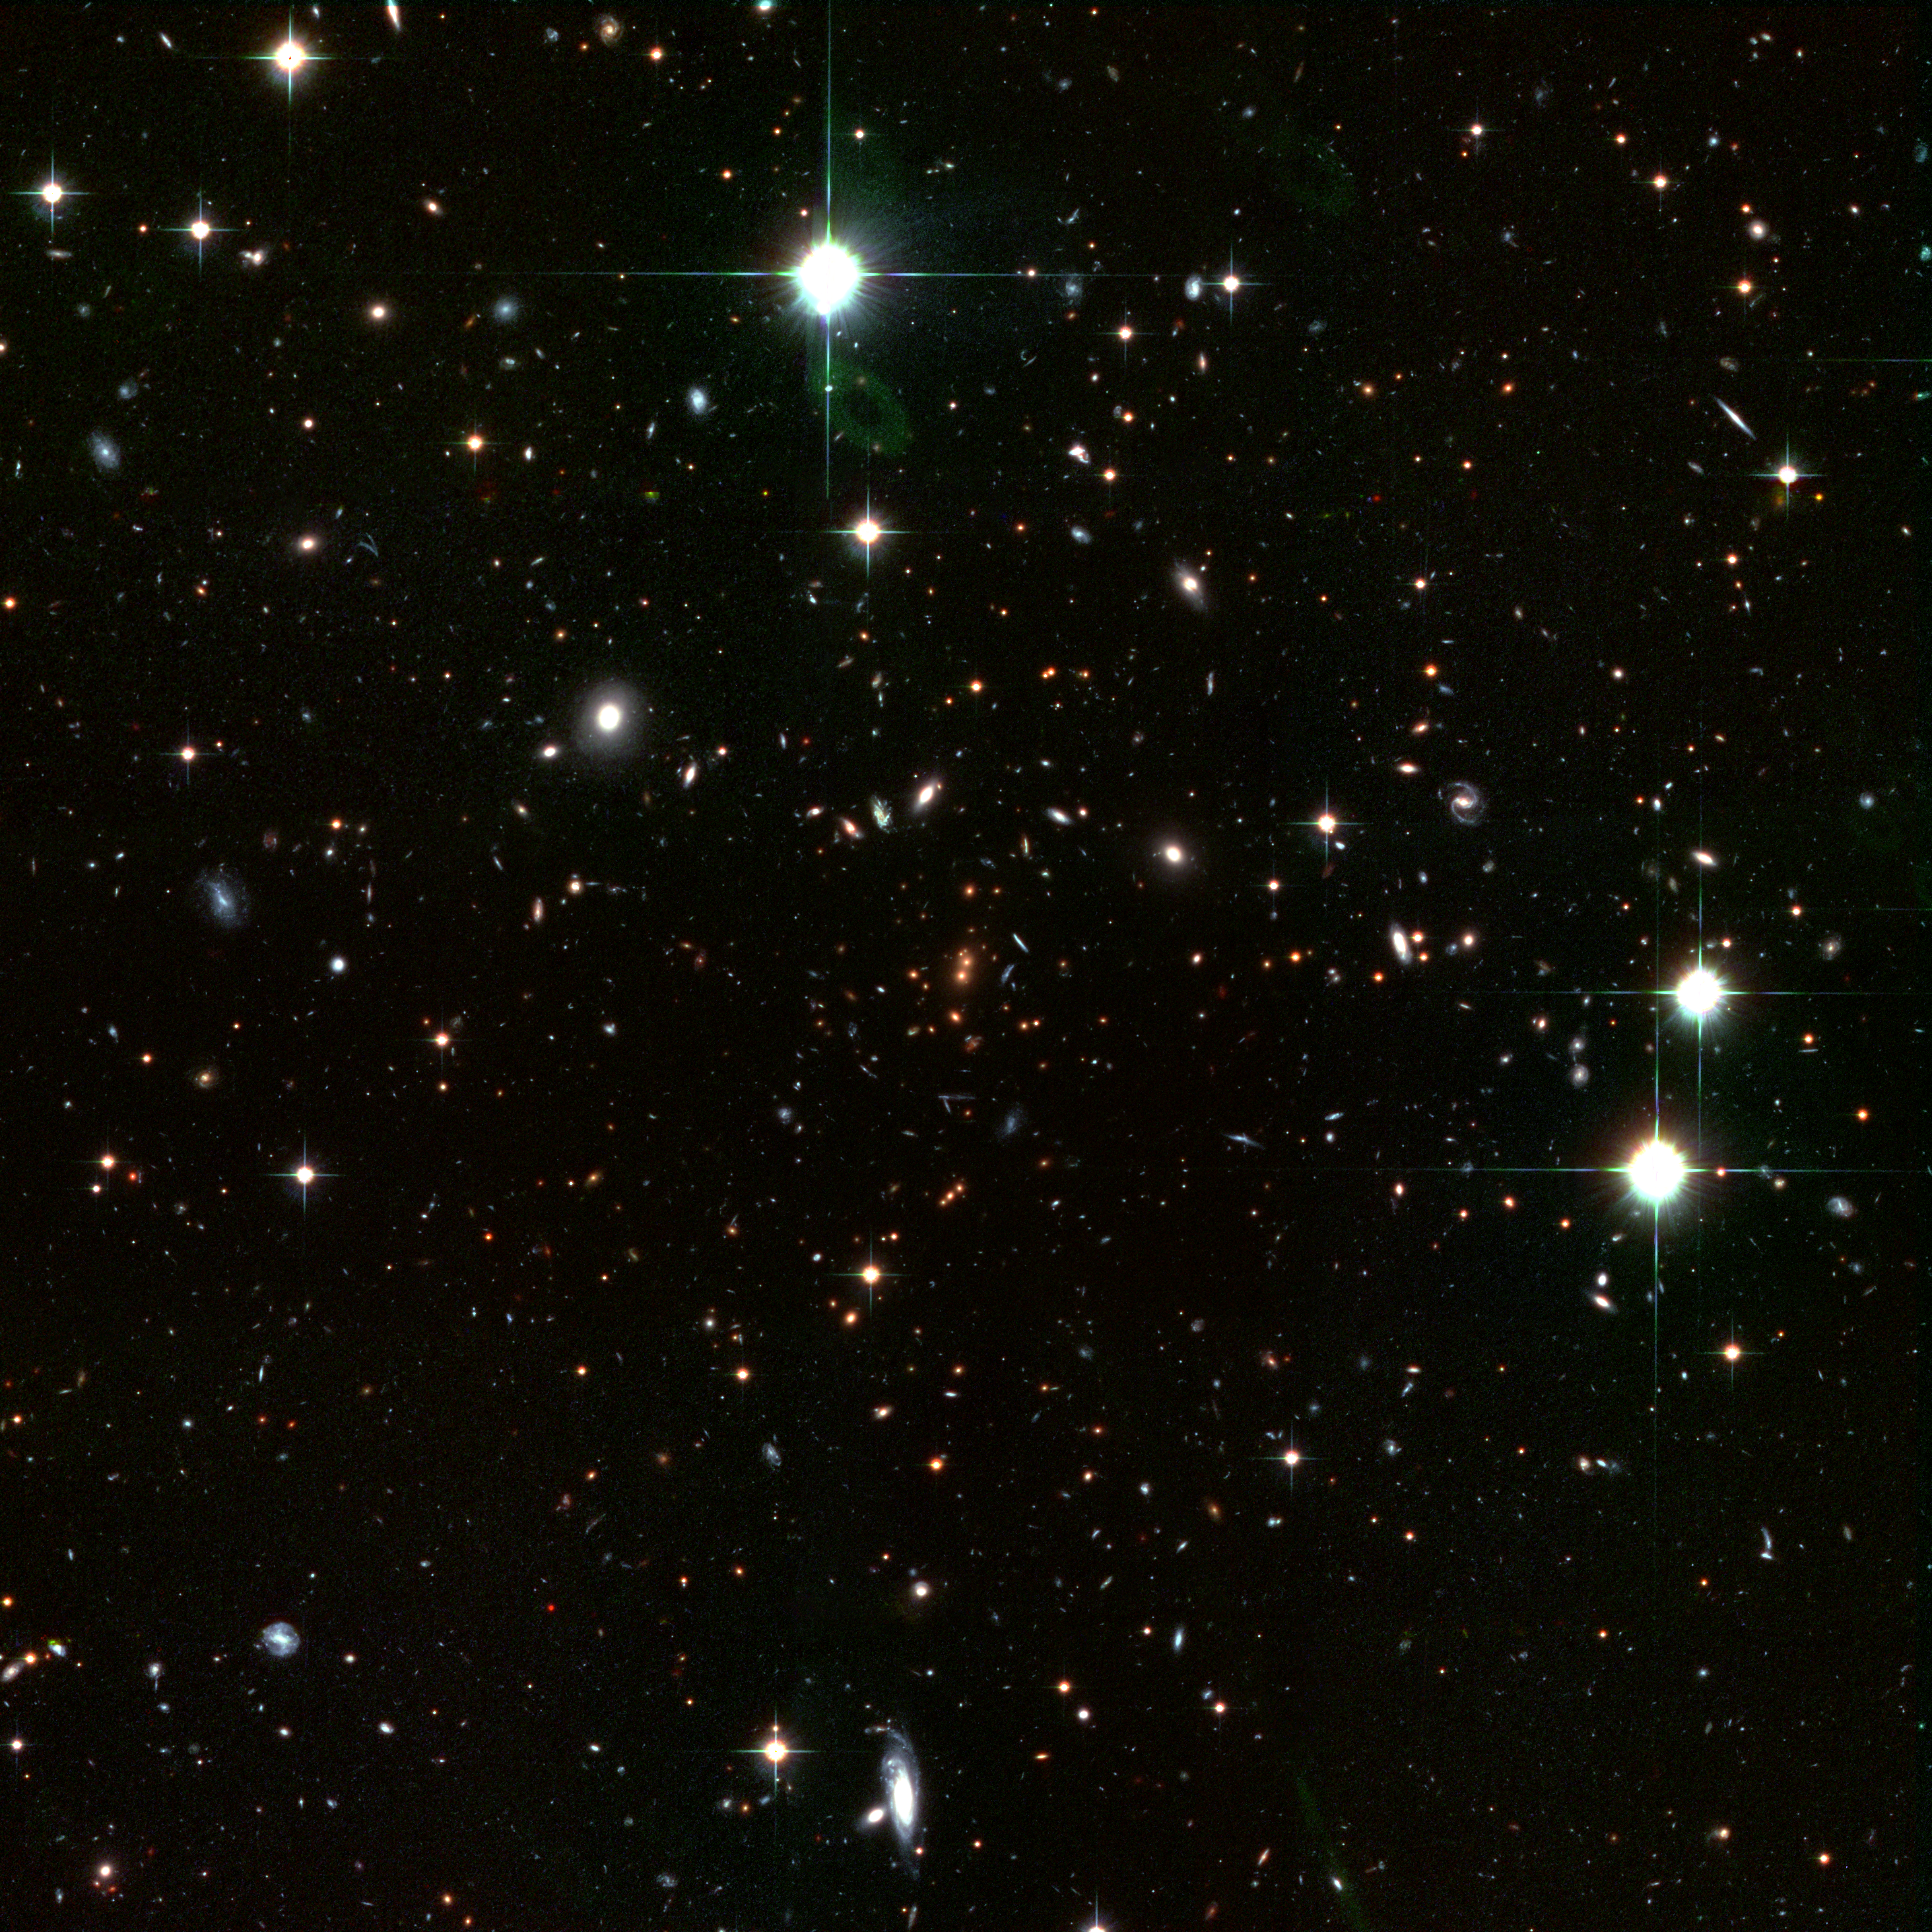

The cluster RDCS1252.9-2927 (overview)

Looking back in time to when the Universe was in its formative youth, the Advanced Camera for Surveys (ACS) aboard the NASA/ESA Hubble Space Telescope captured this revealing image of the galaxy cluster RDCS1252.9-2927.

The image shows the entire cluster (1/15 of a degree, corresponding to about 7 million light-years, across). The cluster probably contains many thousands of galaxies. Most of the other galaxies in the image, including most of the blue galaxies, are foreground or background galaxies. The image, which is made with an additional infrared exposure taken with the European Southern Observatory's Very Large Telescope, shows mature galaxies in a massive cluster that existed when the cosmos was 5 billion years old. The cluster, called RDCS1252.9-2927, is as massive as 200 trillion suns and is the most massive known cluster for its epoch. Dominating the core are a pair of large, reddish elliptical galaxies [near centre of image]. Their red colour indicates an older population of stars. Most of the stars are at least 1 billion years old. The two galaxies appear to be interacting and may eventually merge to form a larger galaxy that is comparable to the brightest galaxies seen in present-day clusters.

The red galaxies surrounding the central pair are also cluster members.

The colour-composite image was assembled from two observations (through i and z filters) taken between May and June 2002 by the ACS Wide Field Camera, and one image with the ISAAC instrument on the VLT taken in 2002 (combined from a J filter exposure and a K filter exposure).

Credit: NASA, ESA, J. Blakeslee (Johns Hopkins University), M. Postman ( Space Telescope Science Institute) and P. Rosati, Chris Lidman & Ricardo Demarco (European Southern Observatory)